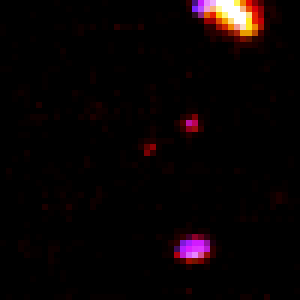

Hubble Deep Field in Infrared

Two close-up NICMOS views of candidate objects which may be over 12 billion light-years away. Each candidate is centered in the frame. The reddish colour may mean all of the starlight has been stretched to infrared wavelengths by the universe's expansion. Alternative explanations are that the objects are closer to us, but the light has been reddened by dust scattering. A new generation of telescopes will be needed to make follow-up observations capable of establishing true distance.

Credit: Rodger I. Thompson (University of Arizona), and NASA/ESA